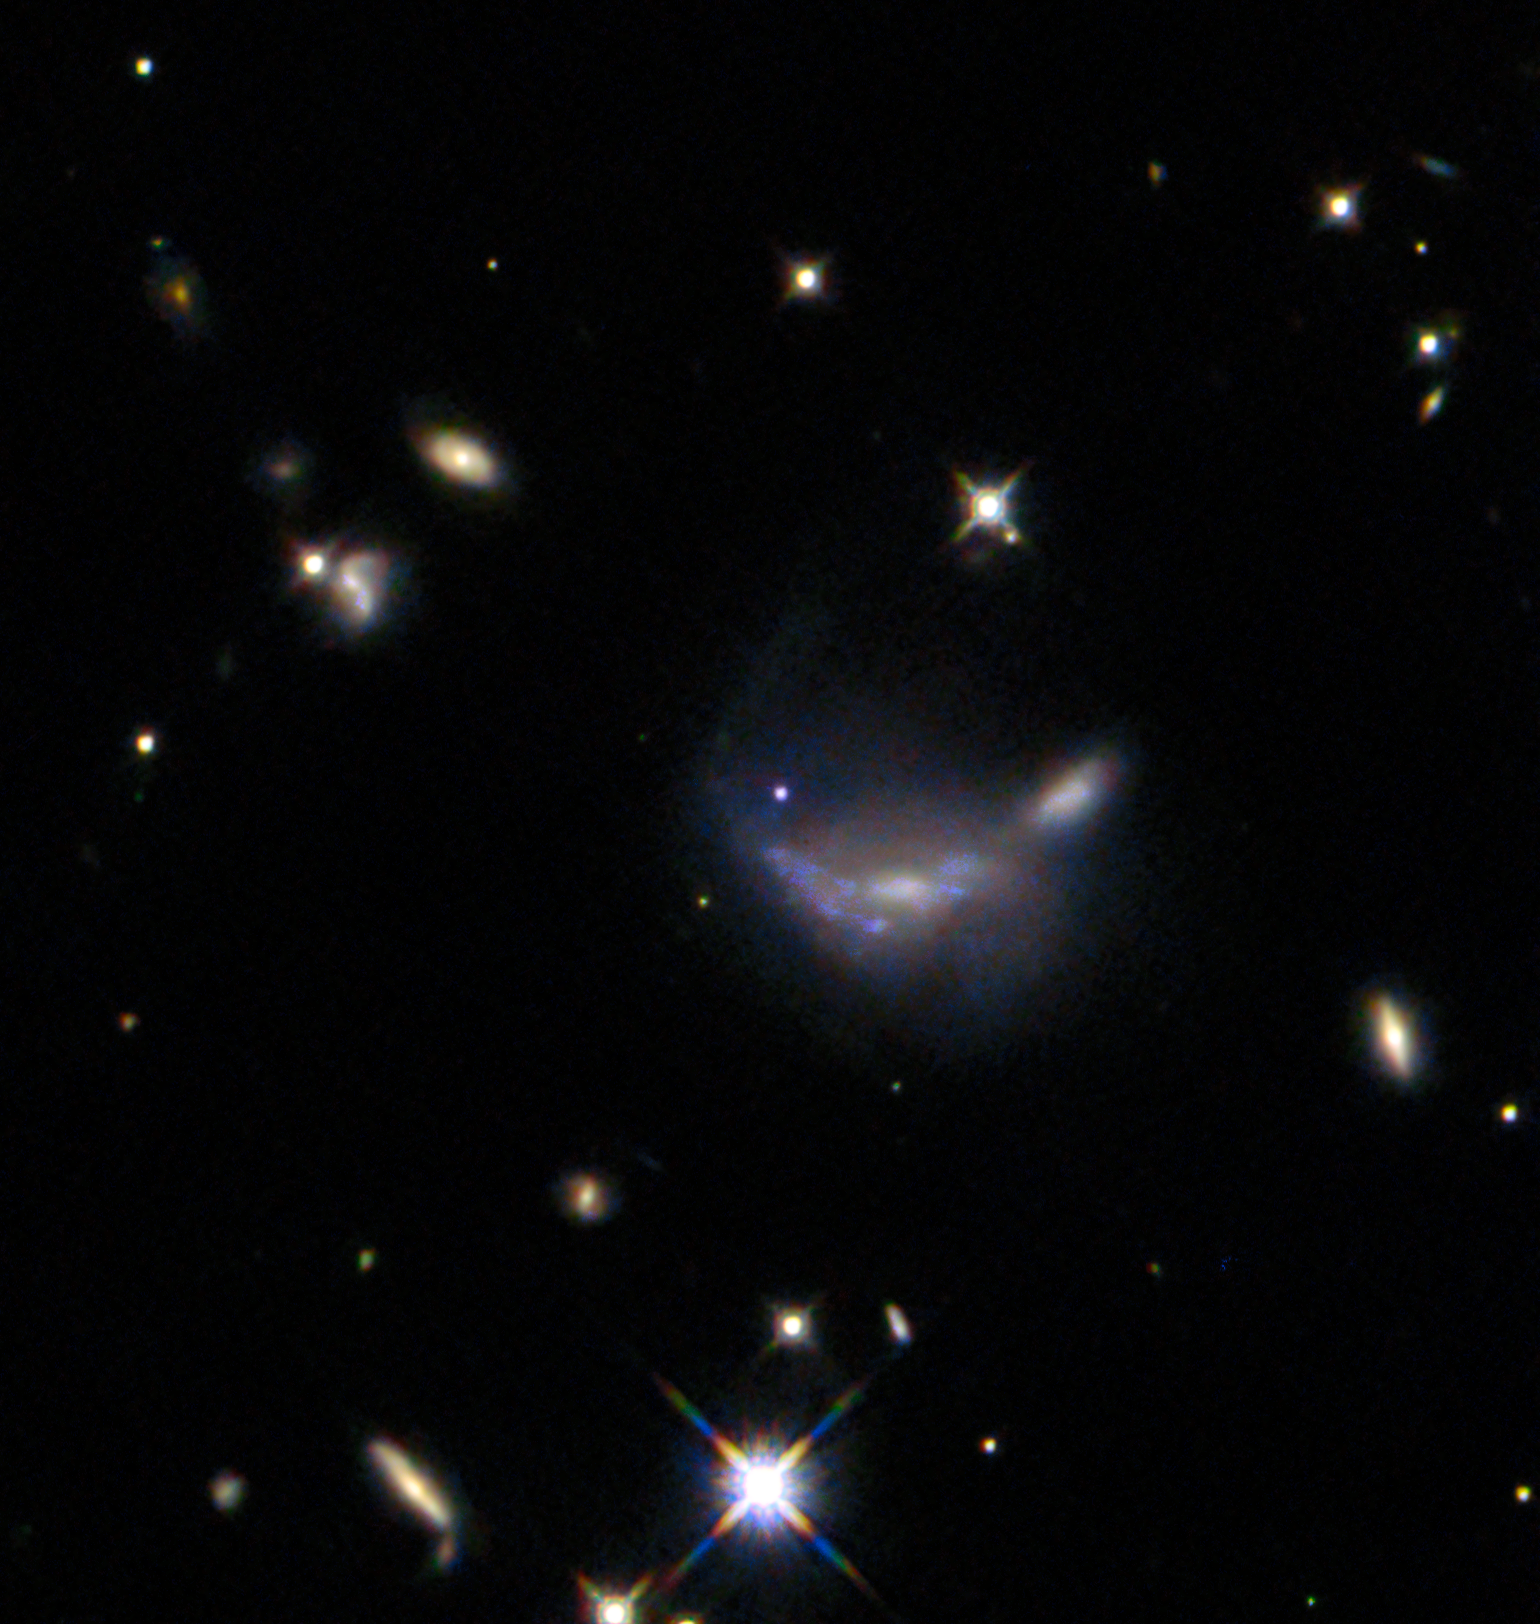

One in a hundred

The subject of this NASA/ESA Hubble Space Telescope Picture of the Week is a supernova-hosting galaxy located about 600 million light-years away in the constellation Gemini. This picture was taken roughly two months after a supernova named SN 2022aajn was discovered in this galaxy. The supernova is visible as a blue dot at the centre of the image, brightening the hazy body of the galaxy.

Other than the announcement of its discovery in November 2022, SN 2022aajn has never been the subject of published research. Why, then, would Hubble observe this supernova? SN 2022aajn is what’s known as a Type Ia supernova, which results from the explosion of the core of a dead star. Supernovae of this type help astronomers measure the distance to faraway galaxies. This is possible because Type Ia supernovae are thought to be of the same intrinsic luminosity — no matter how bright they seem from Earth, they put out the same amount of light as other Type Ia supernovae. Thus, by comparing the observed brightness to the expected brightness, researchers can calculate the distance to the supernova and its host galaxy.

This seemingly simple measurement method is complicated by cosmic dust. The farther away a supernova is, the fainter and redder it will appear — but intergalactic dust can make a supernova appear fainter and redder as well. To understand this complication, researchers will use Hubble to survey a total of 100 Type Ia supernovae in seven wavelength bands from the ultraviolet to the near-infrared. This image combines data taken at four infrared wavelengths. Infrared light passes through dust more easily than visible or ultraviolet light. By comparing the brightness of the sampled supernovae across different wavelengths, researchers can disentangle the effects of dust and distance, helping to improve measurements of galaxies billions of light-years away and even the expansion of our Universe.

Credit: ESA/Hubble & NASA, R. J. Foley (UC Santa Cruz)